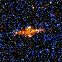

Hubble's Top Ten Gravitational Lenses. A View of HST 01248+0351

HST 01248+0351 is a lensed pair on either side of the edge-on disk lensing galaxy.

Credit: Kavan Ratnatunga (Carnegie Mellon Univ.) and NASA/ESA